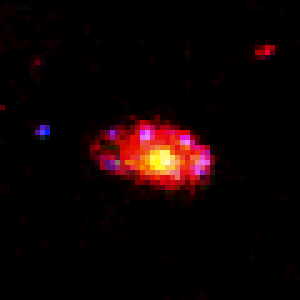

Comparative View of Galaxy's Stellar Populations

The underlying disk structure, containing older stars, is seen clearly in this infrared Deep Field image taken with Hubble's Near Infrared Camera and Multi-Object Spectrometer(NICMOS) in January 1998.

Credit: Rodger I. Thompson (University of Arizona), and NASA/ESA